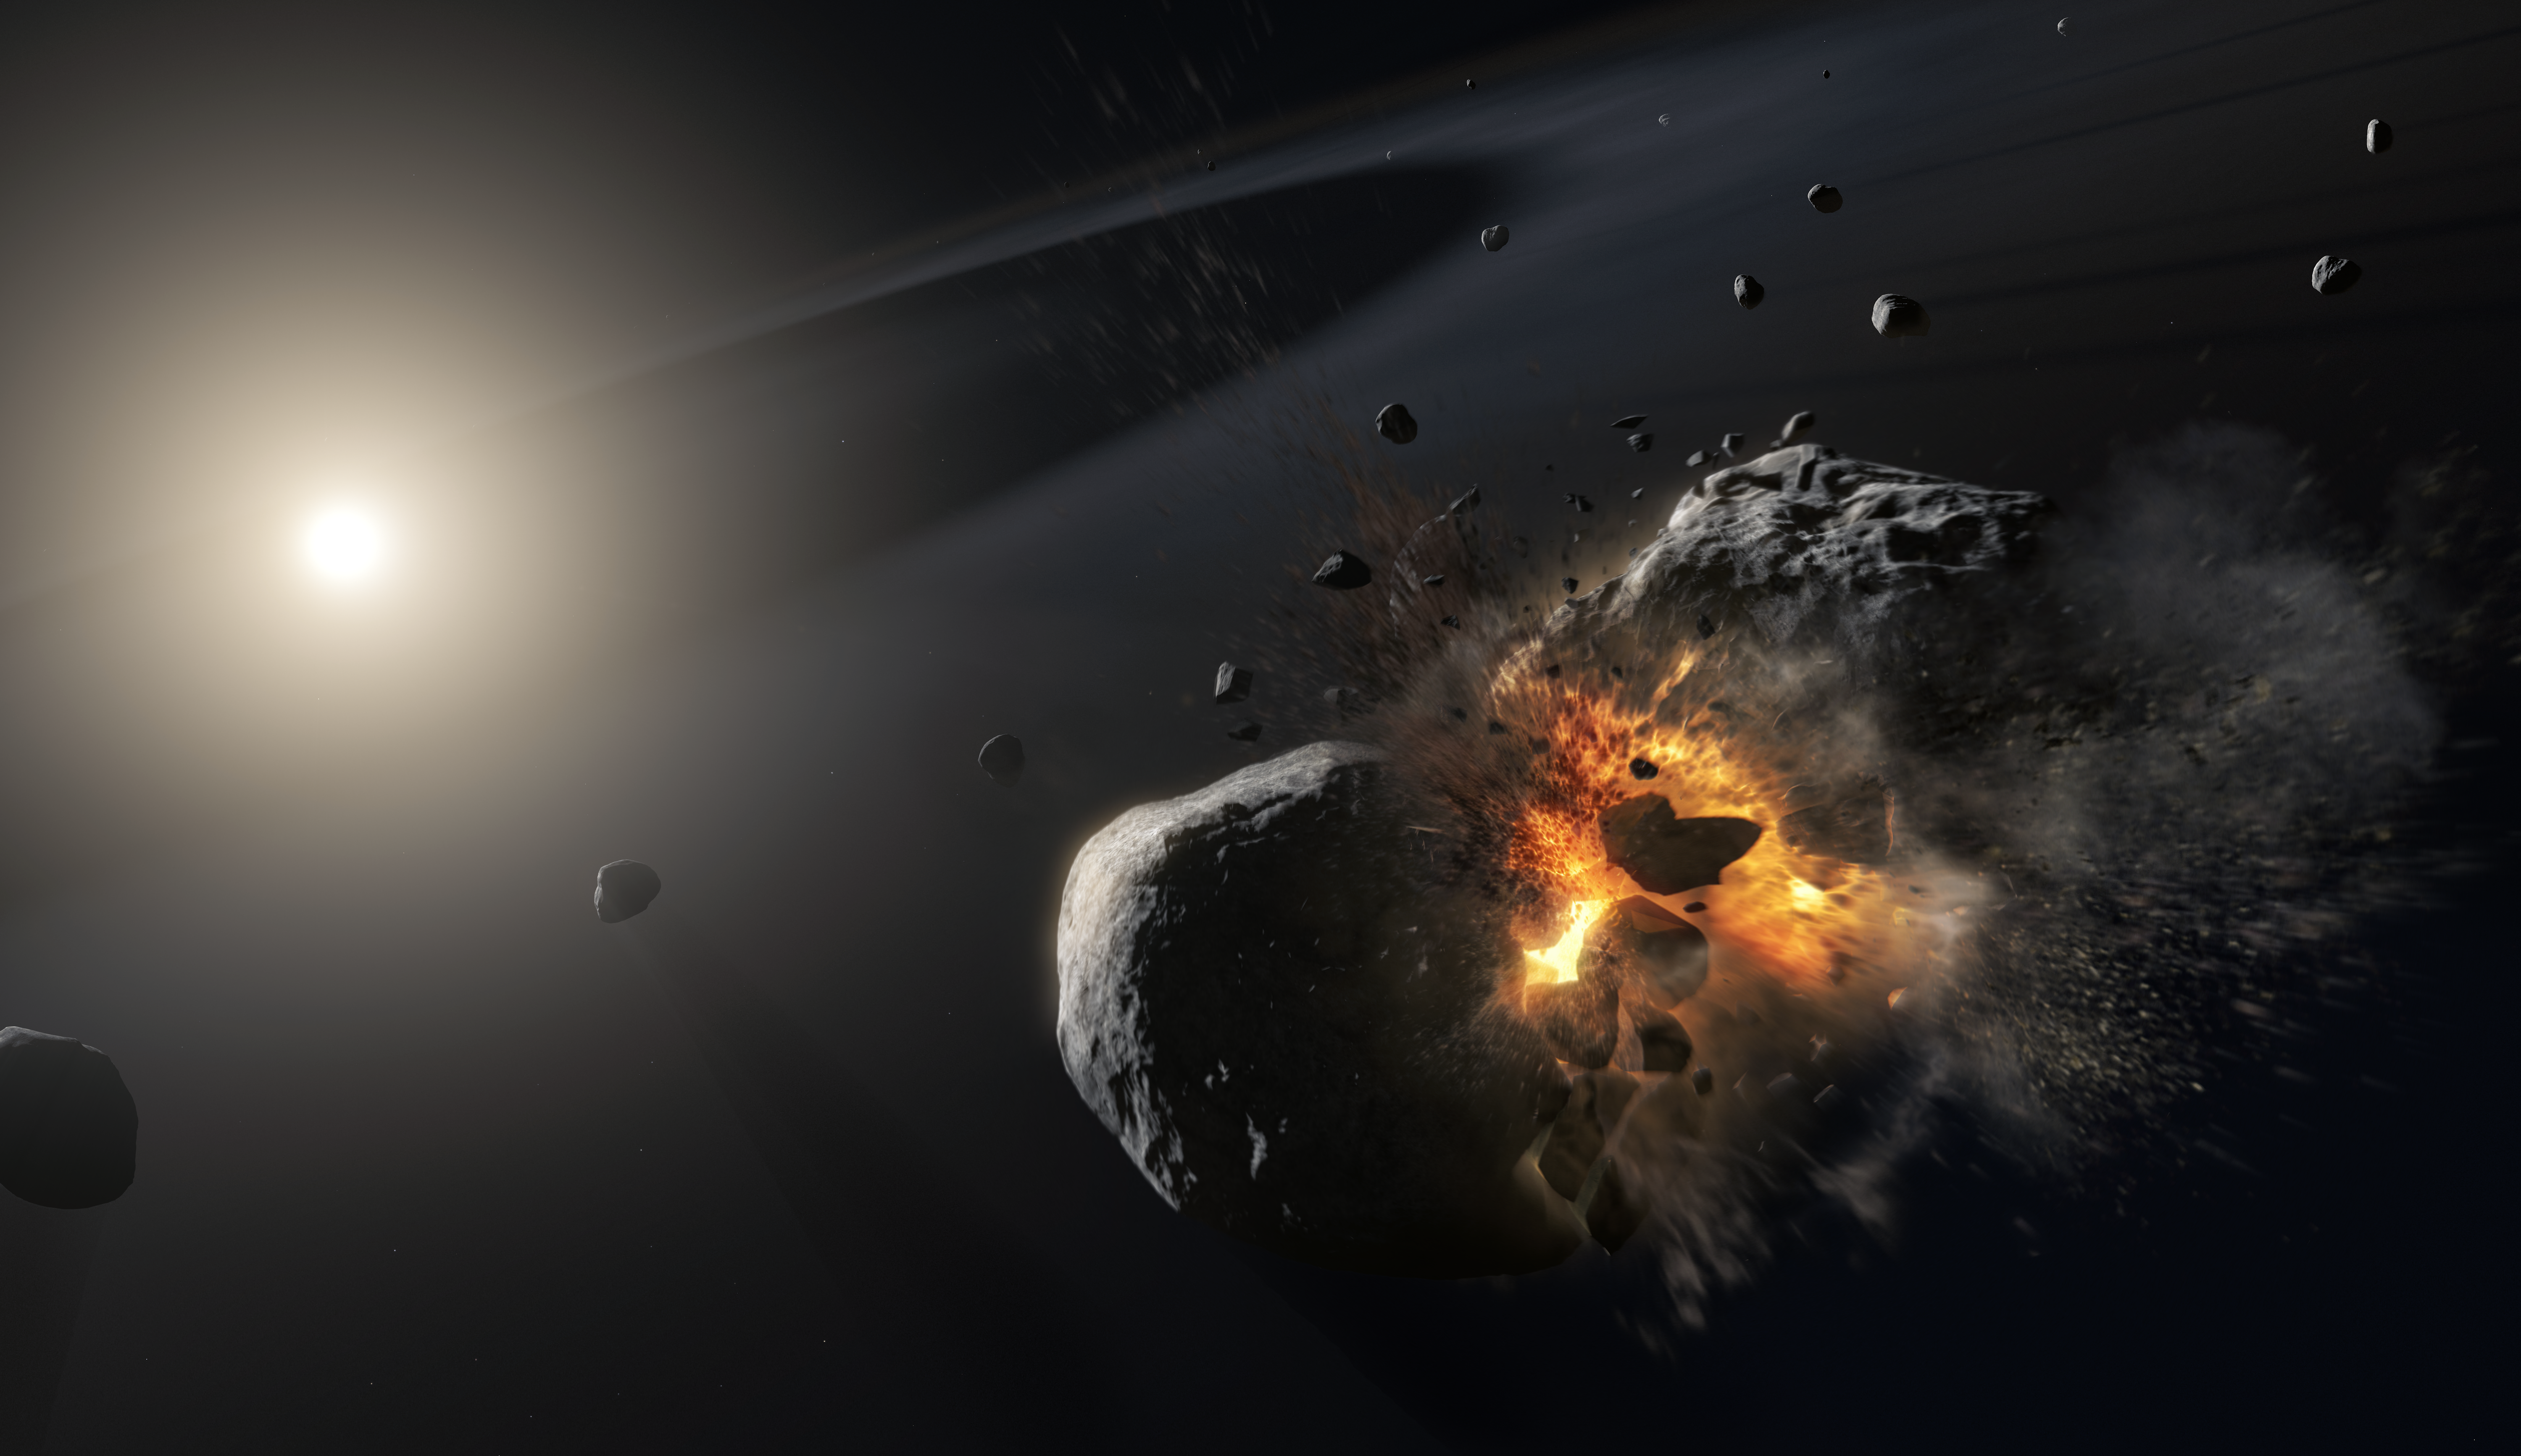

Visualisation of Fomalhaut and Fomalhaut b (Artist’s Impression)

Data from the NASA/ESA Hubble Space Telescope have revealed an expanding cloud of dust produced in a collision between two large bodies orbiting the bright nearby star Fomalhaut. This is the first time such a catastrophic event around another star has been imaged.

Credit: ESA/NASA, M. Kornmesser